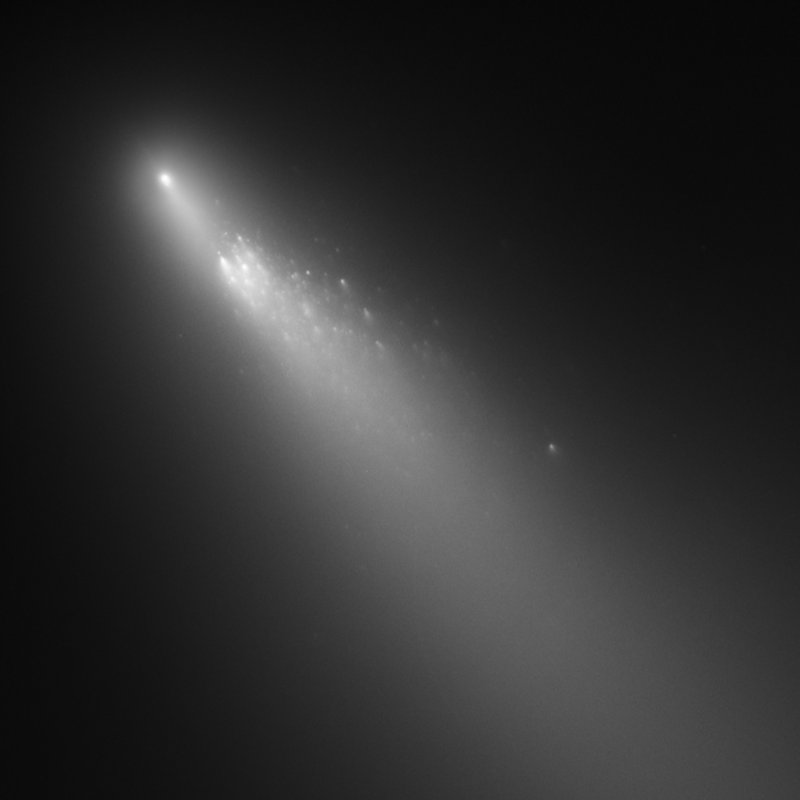

Comet 73P/Schwassmann-Wachmann 3 - Fragment B [18 April 2006]

The first image from a three-day observation with Hubble showing the breakup of Comet 73P/Schwassmann-Wachmann 3's Fragment B.

Credit: NASA, ESA, H. Weaver (APL/JHU), M. Mutchler and Z. Levay (STScI)